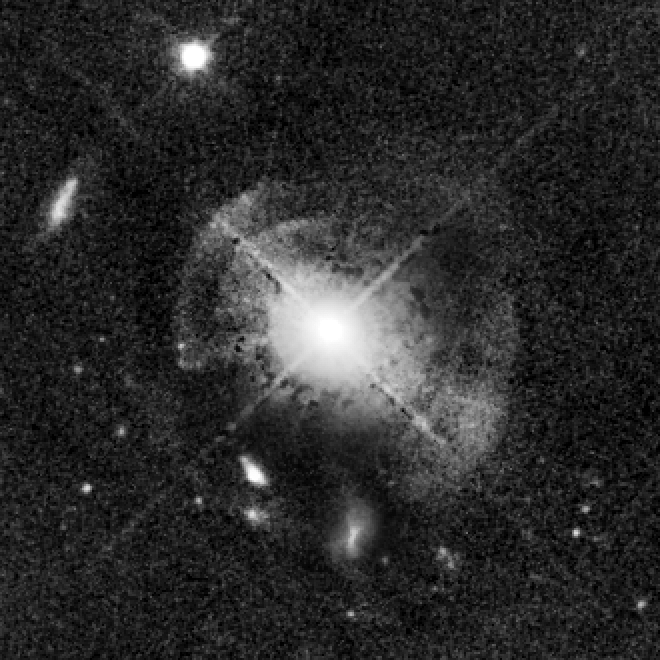

Quasar MC2 1635+119 (Enhanced)

This image taken by Hubble shows the quasar MC2 1635+119. The quasar sits in an indisturbed elliptical galaxy which shows a shell structure indicating a recent merger. An intermediate population of stars is dominating the galaxy and probably the result of a strong star burst at the time of the merging process.

Credit: NASA, ESA, and G. Canalizo (University of California, Riverside)